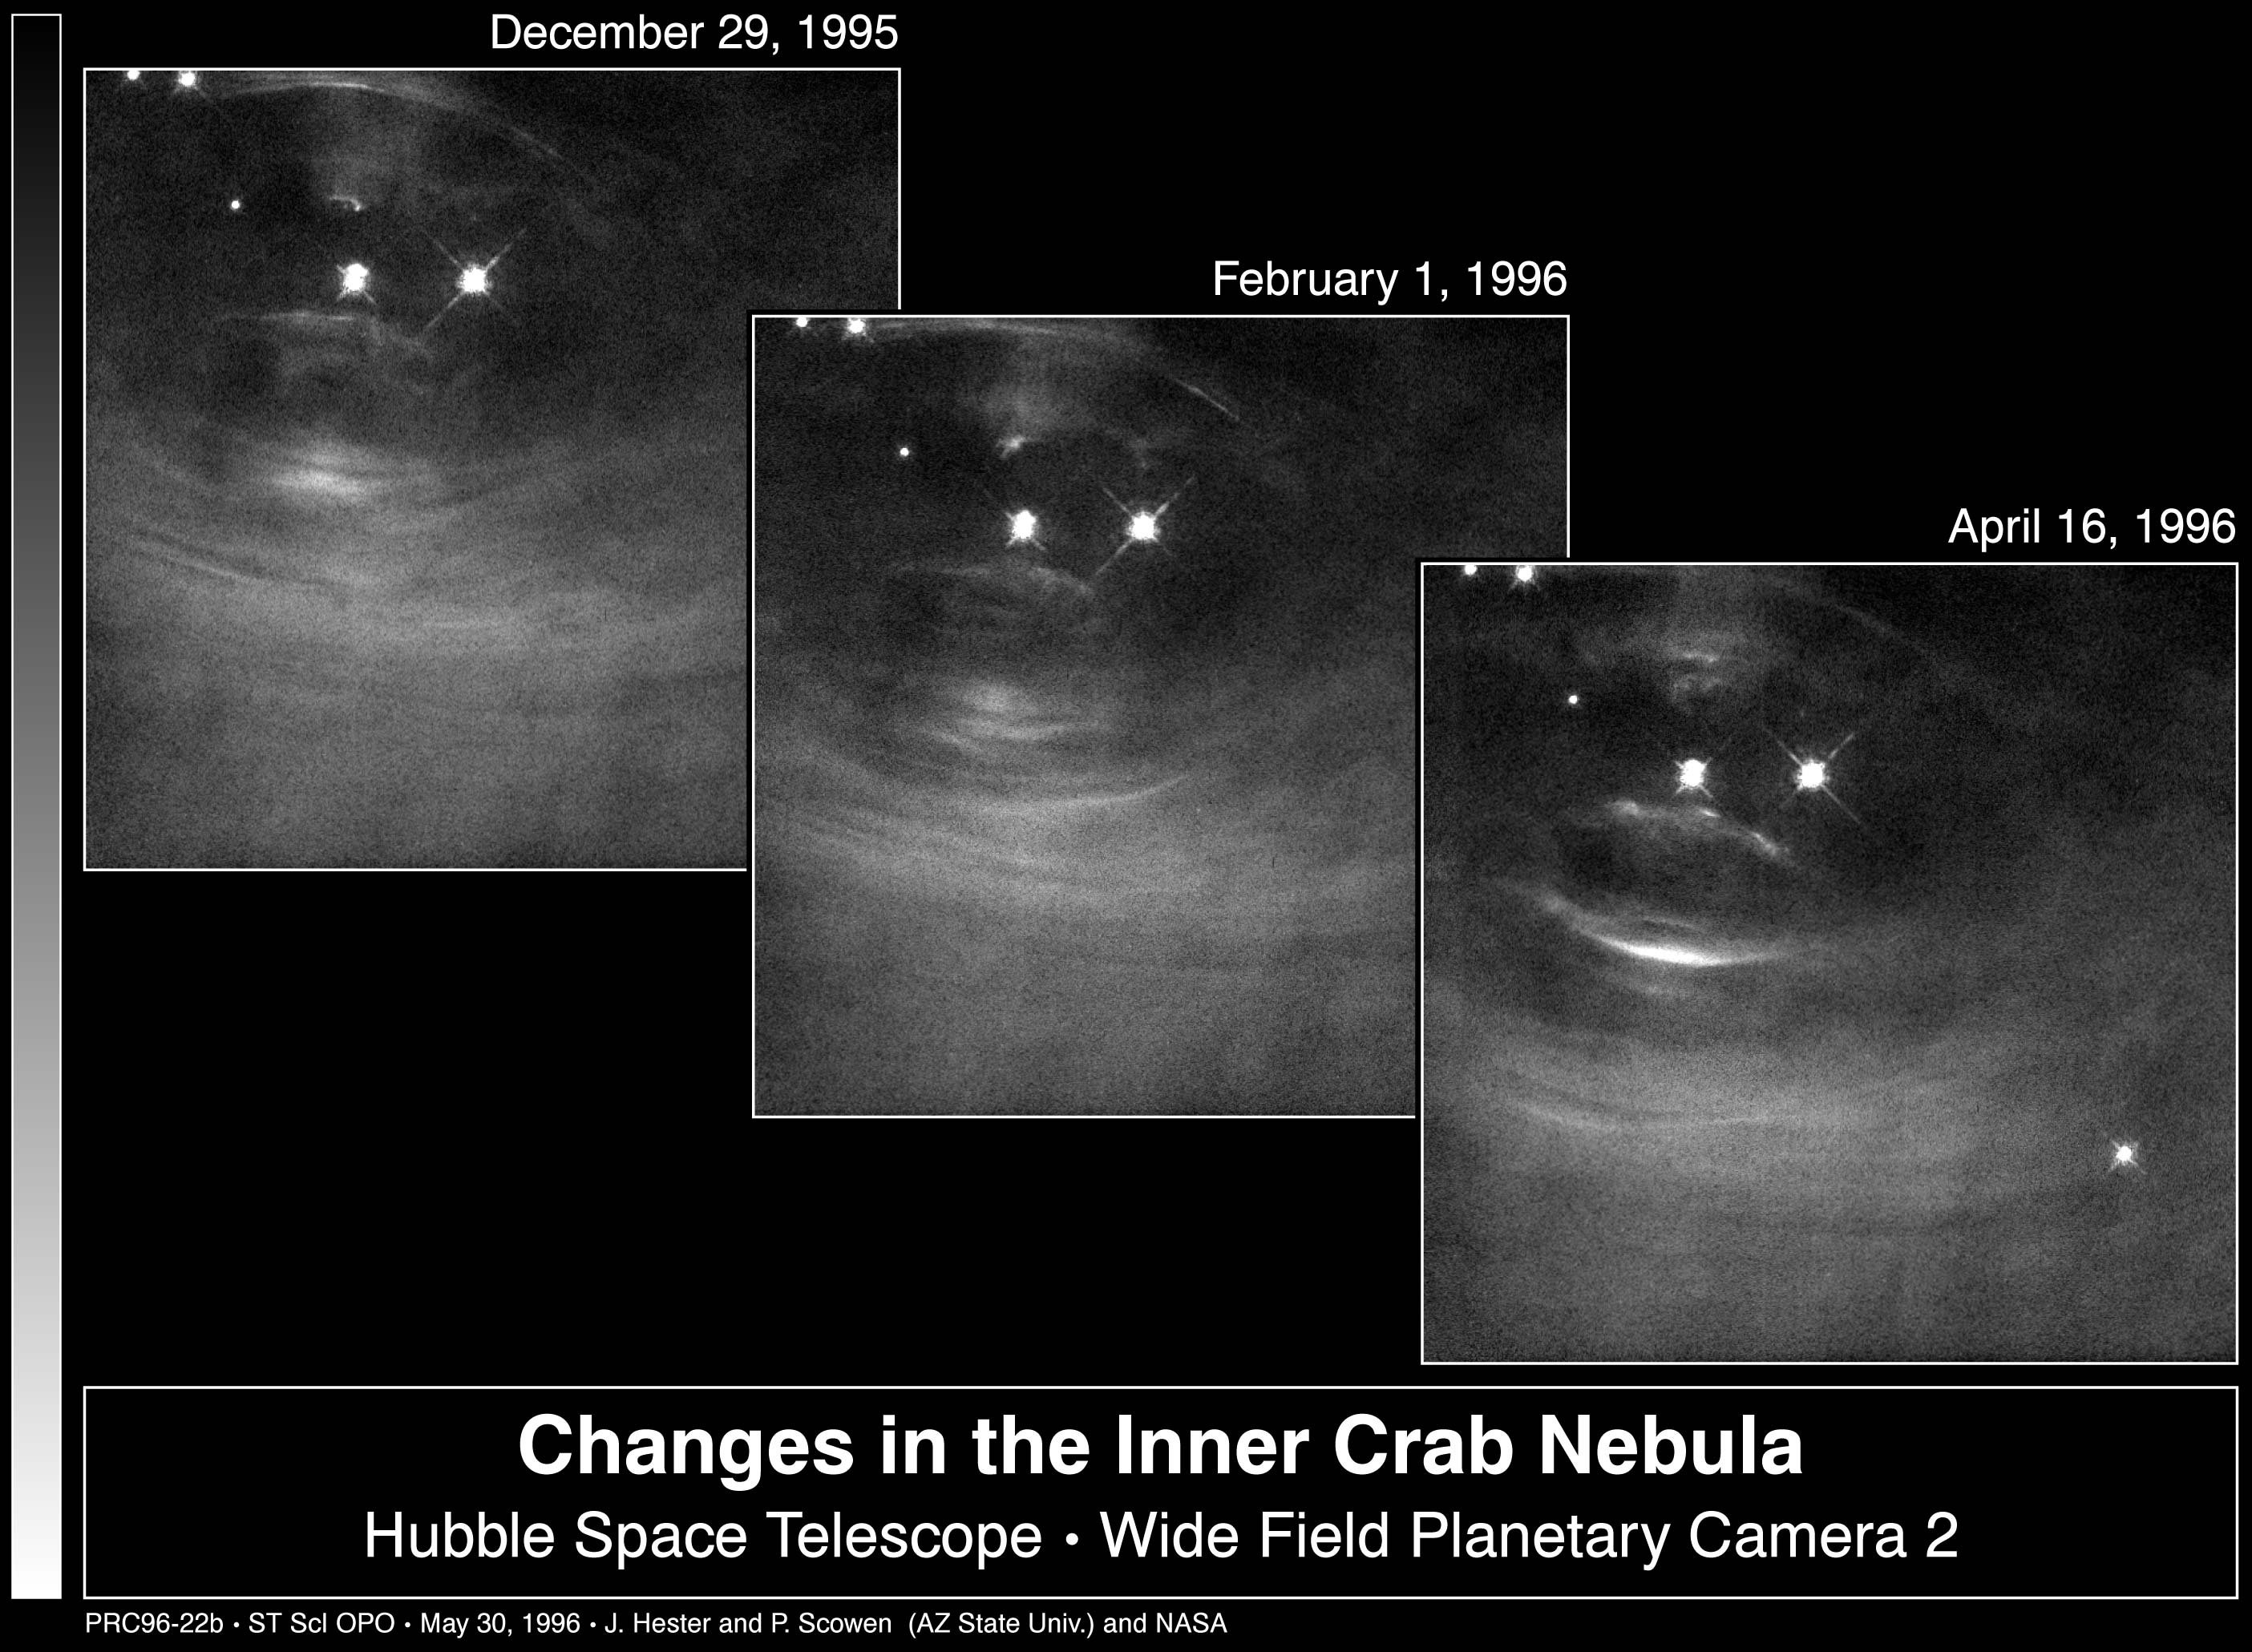

Changes in the Inner Crab Nebula

Scientists are learning more about how pulsars work by studying a series of Hubble Space Telescope images of the heart of the Crab Nebula. The images, taken over a period of several months, show that the Crab is a far more dynamic object than previously understood.

Credit: Jeff Hester and Paul Scowen (Arizona State University), and NASA/ESA